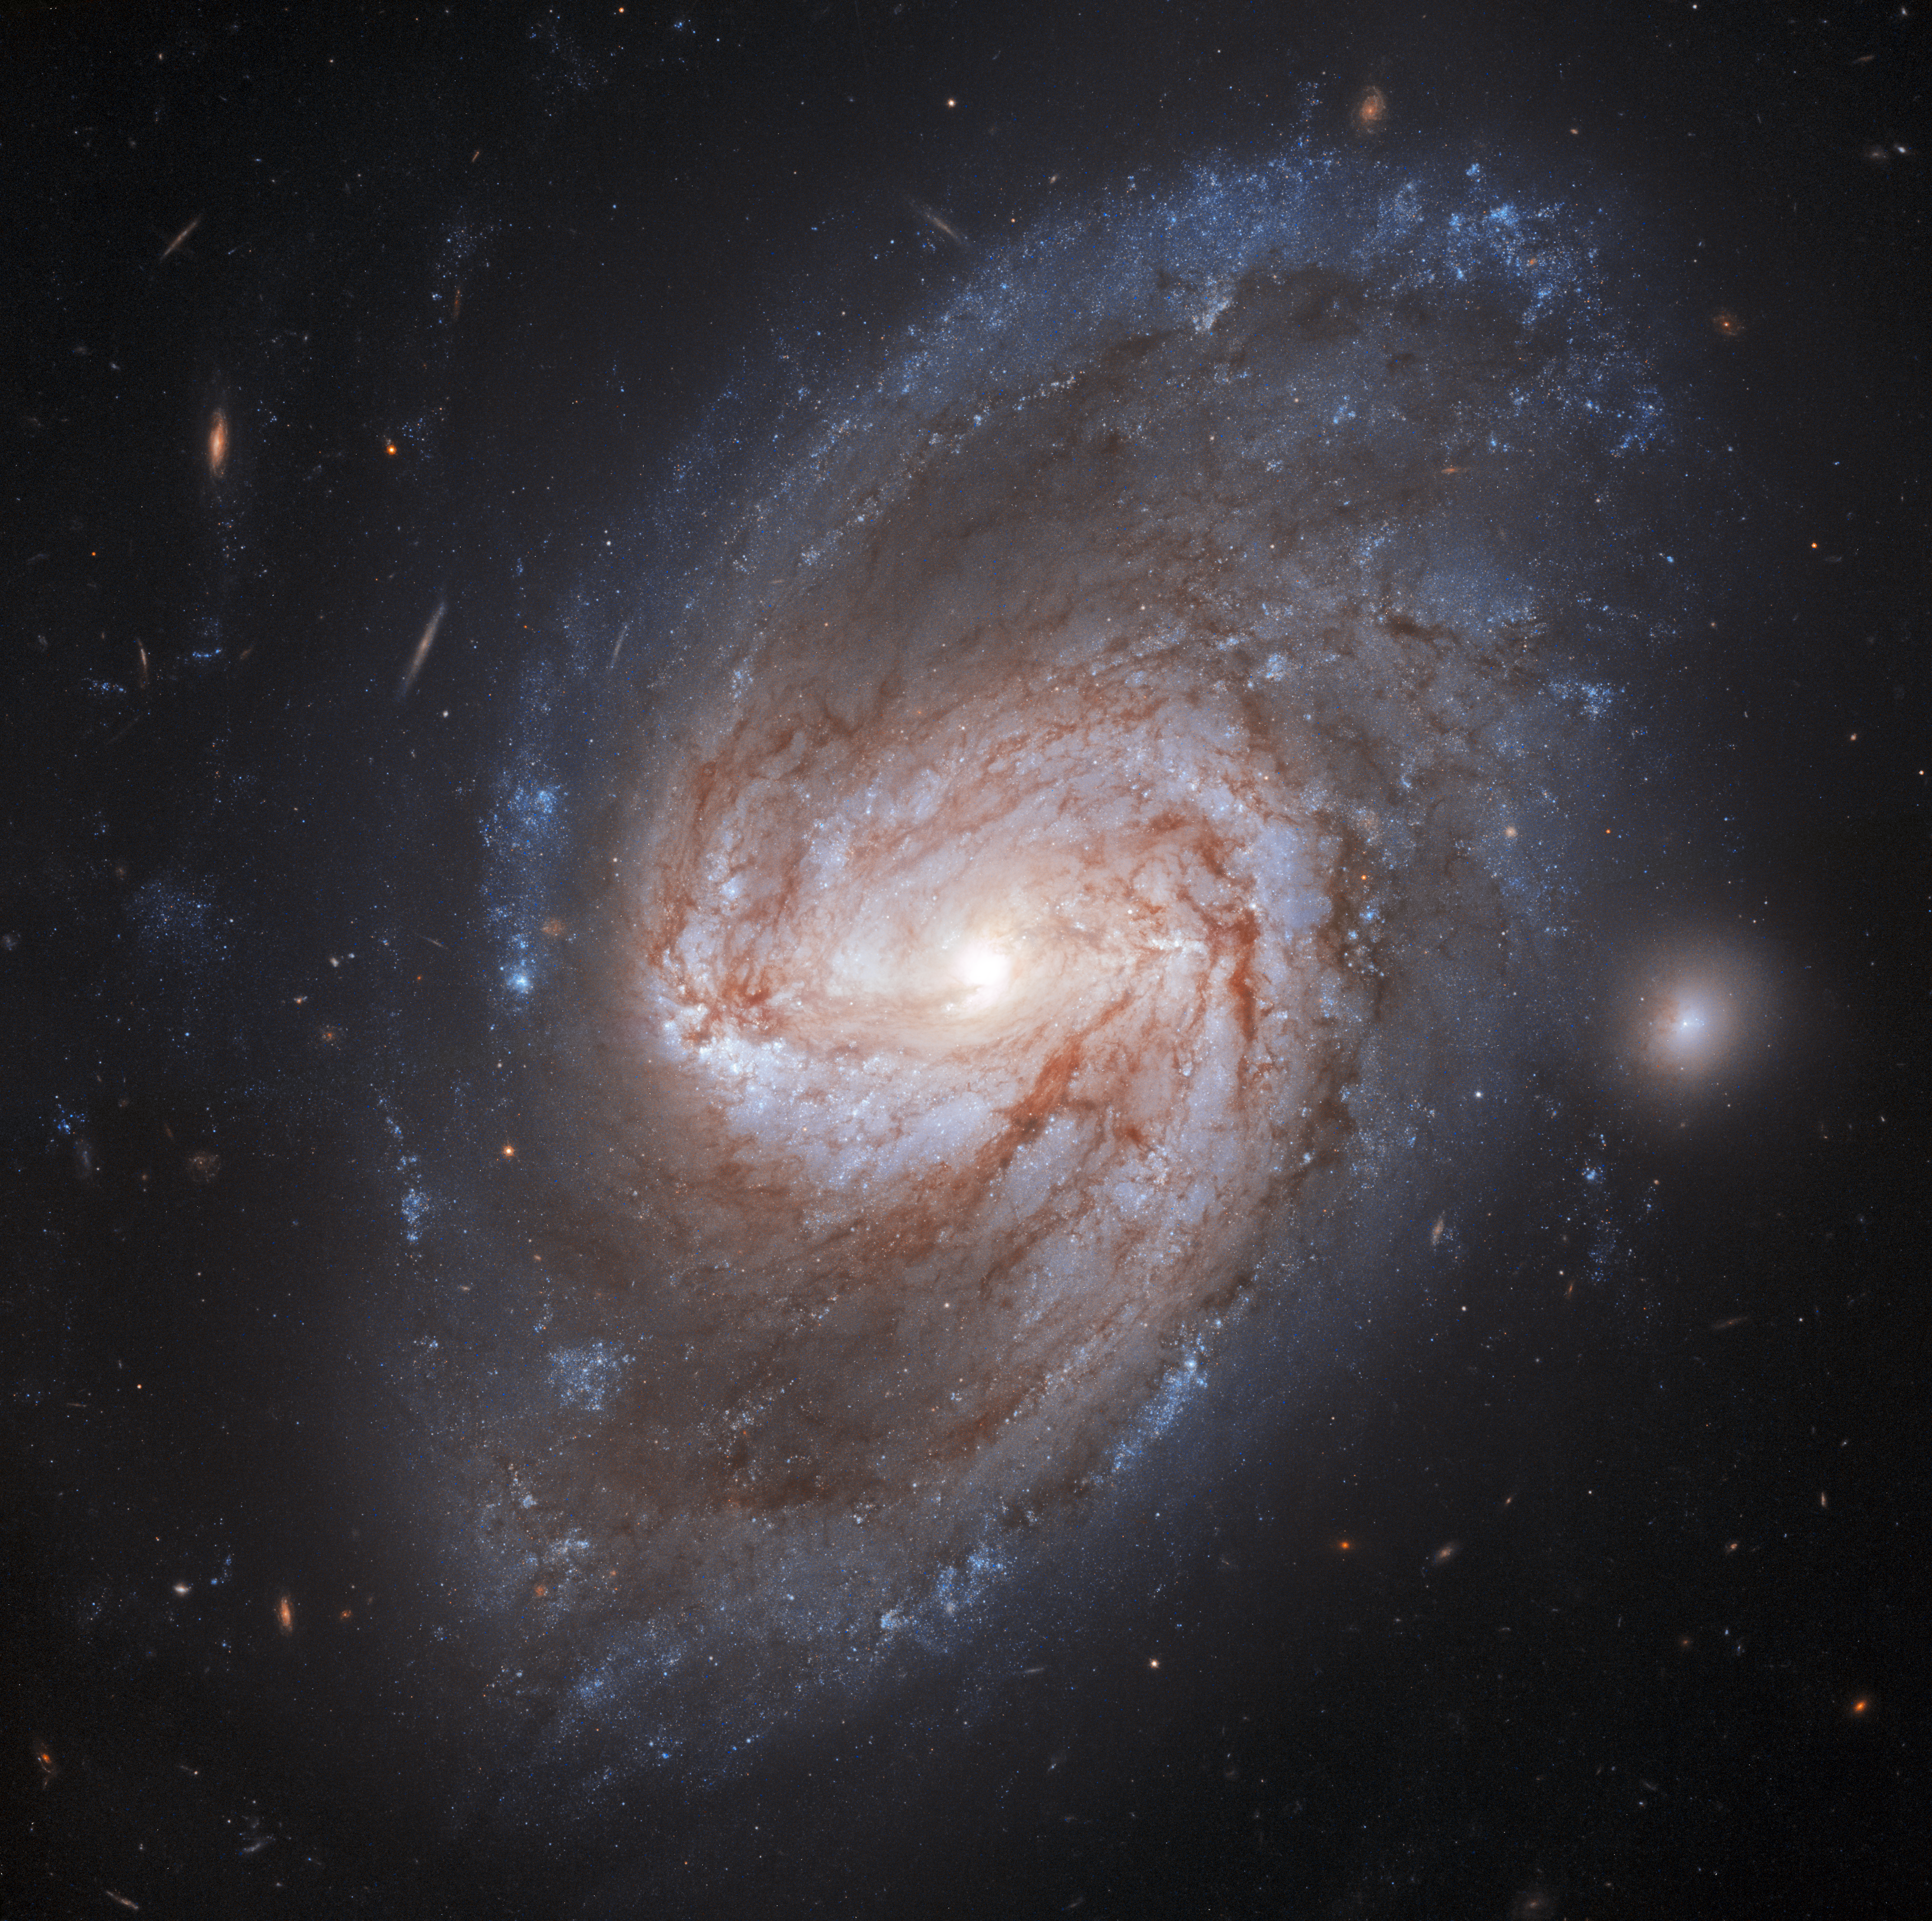

Galaxy Galaxy, Burning Bright!

In the forests of the night lies a barred spiral galaxy called NGC 3583, imaged here by the NASA/ESA Hubble Space Telescope. This is a barred spiral galaxy with two arms that twist out into the Universe. This galaxy is located 98 million light-years away from the Milky Way. Two supernovae exploded in this galaxy, one in 1975 and another, more recently, in 2015.

There are a few different ways that supernova can form. In the case of these two supernovae, the explosions evolved from two independent binary star systems in which the stellar remnant of a Sun-like star, known as a white dwarf, was collecting material from its companion star. Feeding off of its partner, the white dwarf gorged on the material until it reached a maximum mass. At this point, the star collapsed inward before exploding outward in a brilliant supernova.

Two of these events were spotted in NGC 3583, and though not visible in this picture of the week, we can still marvel at the galaxy’s fearful symmetry.

Credit: ESA/Hubble & NASA, A. Riess et al.